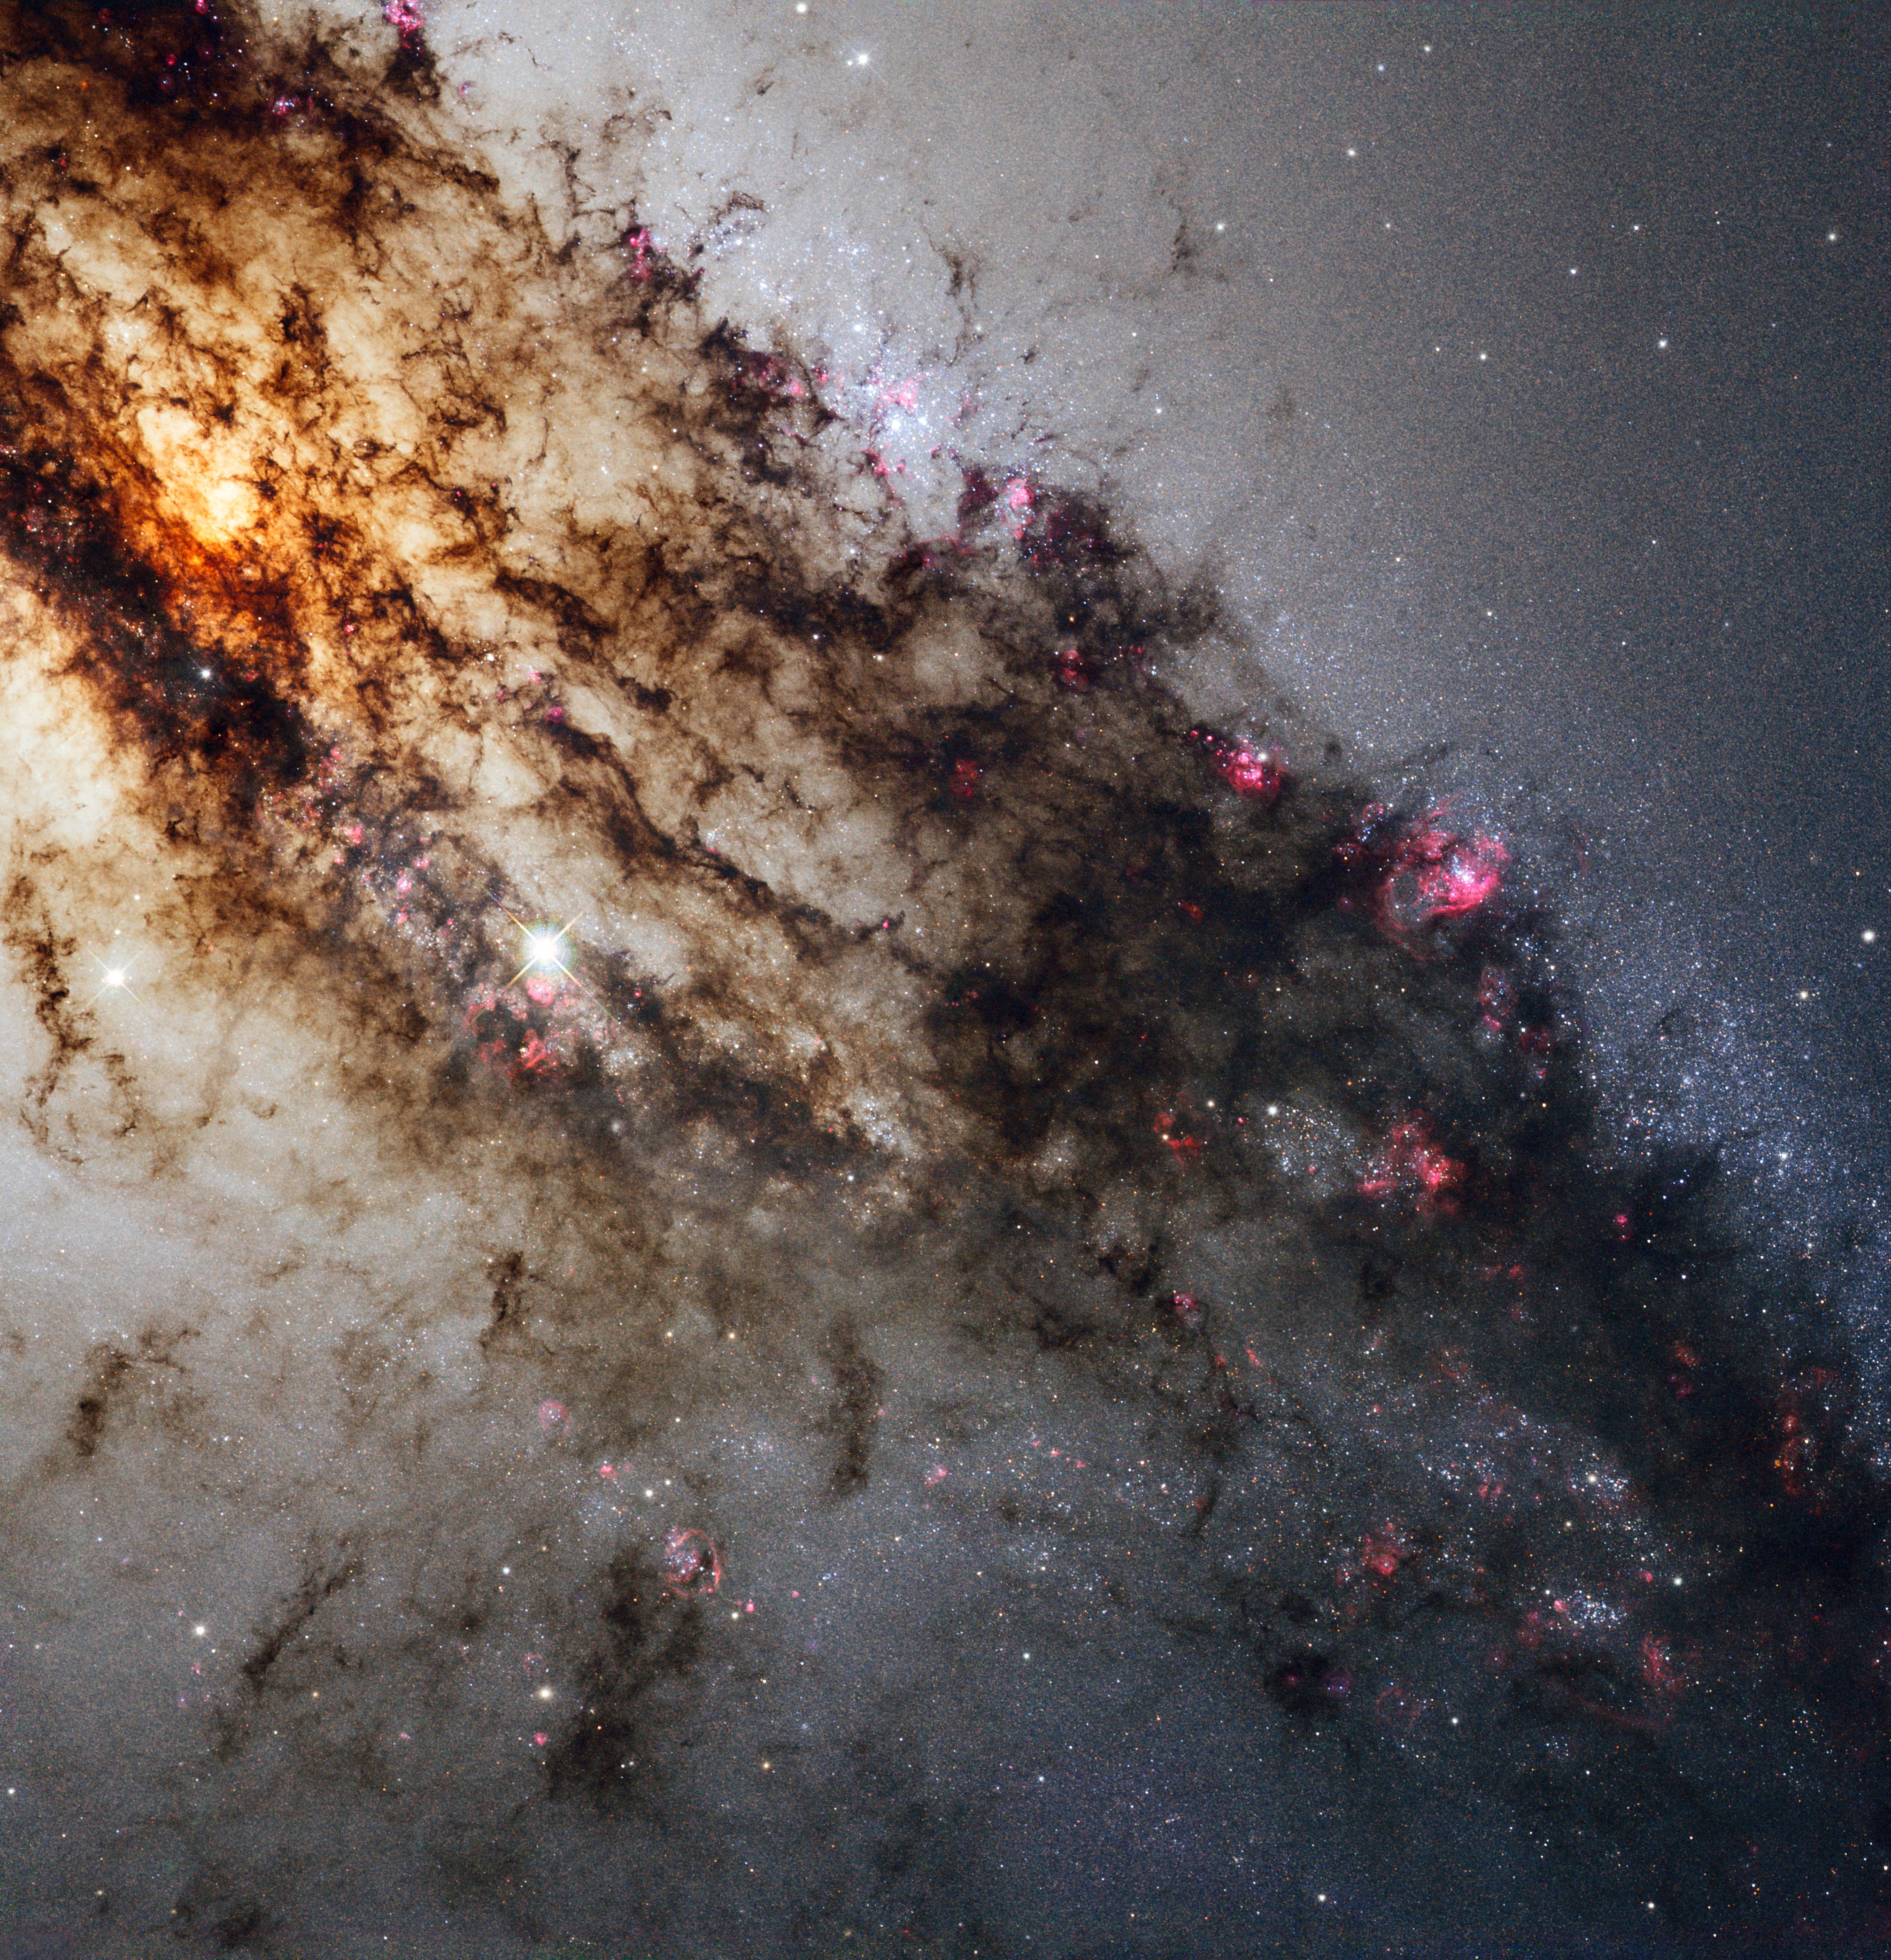

Spectacular Hubble view of Centaurus A

Centaurus A, also known as NGC 5128, is well known for its dramatic dusty lanes of dark material. Hubble’s new observations, using its most advanced instrument, the Wide Field Camera 3, are the most detailed ever made of this galaxy. They have been combined here in a multi-wavelength image which reveals never-before-seen detail in the dusty portion of the galaxy.

As well as features in the visible spectrum, this composite shows ultraviolet light, which comes from young stars, and near-infrared light, which lets us glimpse some of the detail otherwise obscured by the dust.

Credit: NASA, ESA, and the Hubble Heritage (STScI/AURA)-ESA/Hubble Collaboration. Acknowledgment: R. O’Connell (University of Virginia) and the WFC3 Scientific Oversight Committee